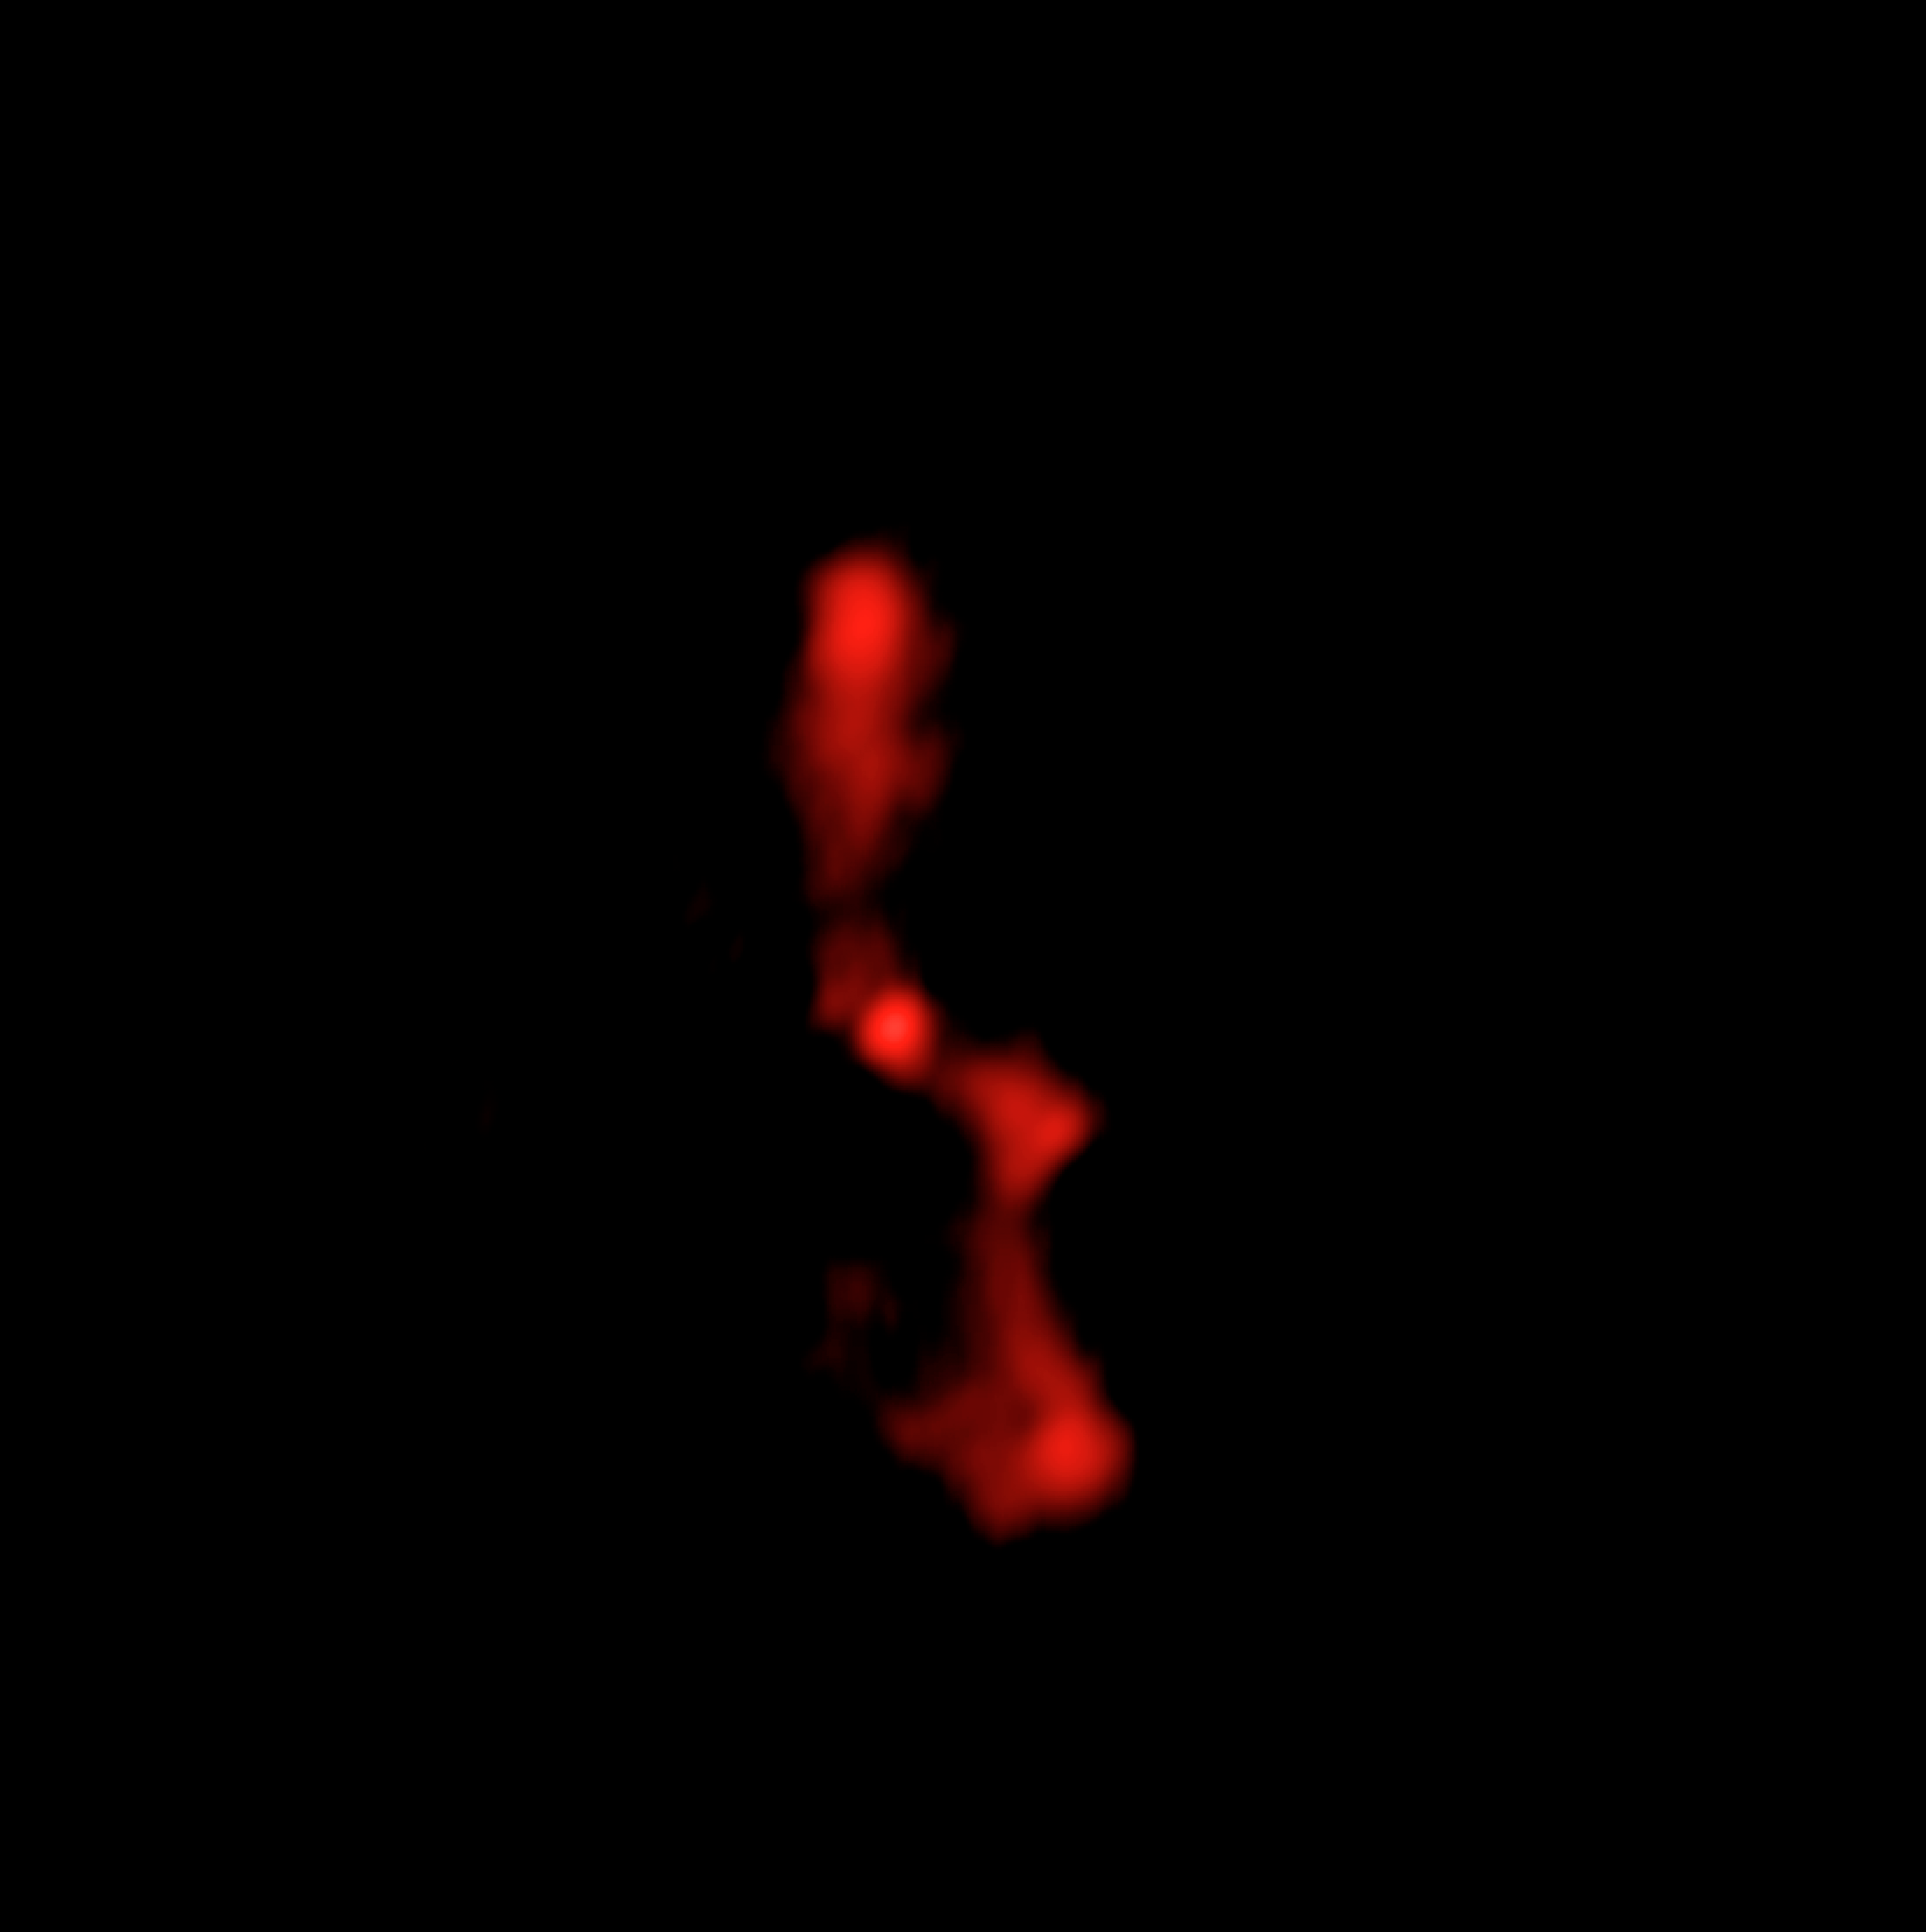

Radio Image of Galaxy Cluster MS 0735

This radio image of galaxy cluster MS 0735.6+7421 was taken by NRAO's Very Large Array (VLA) in October 2004. The radio image shows jets of high energy particles ejected from a supermassive black hole, which is buried in the middle of the large central galaxy. The jets created the enormous cavities visible in the Chandra image taken in November 2003.

Credit: NRAO/VLA, and L. Birzan and team (Ohio University)